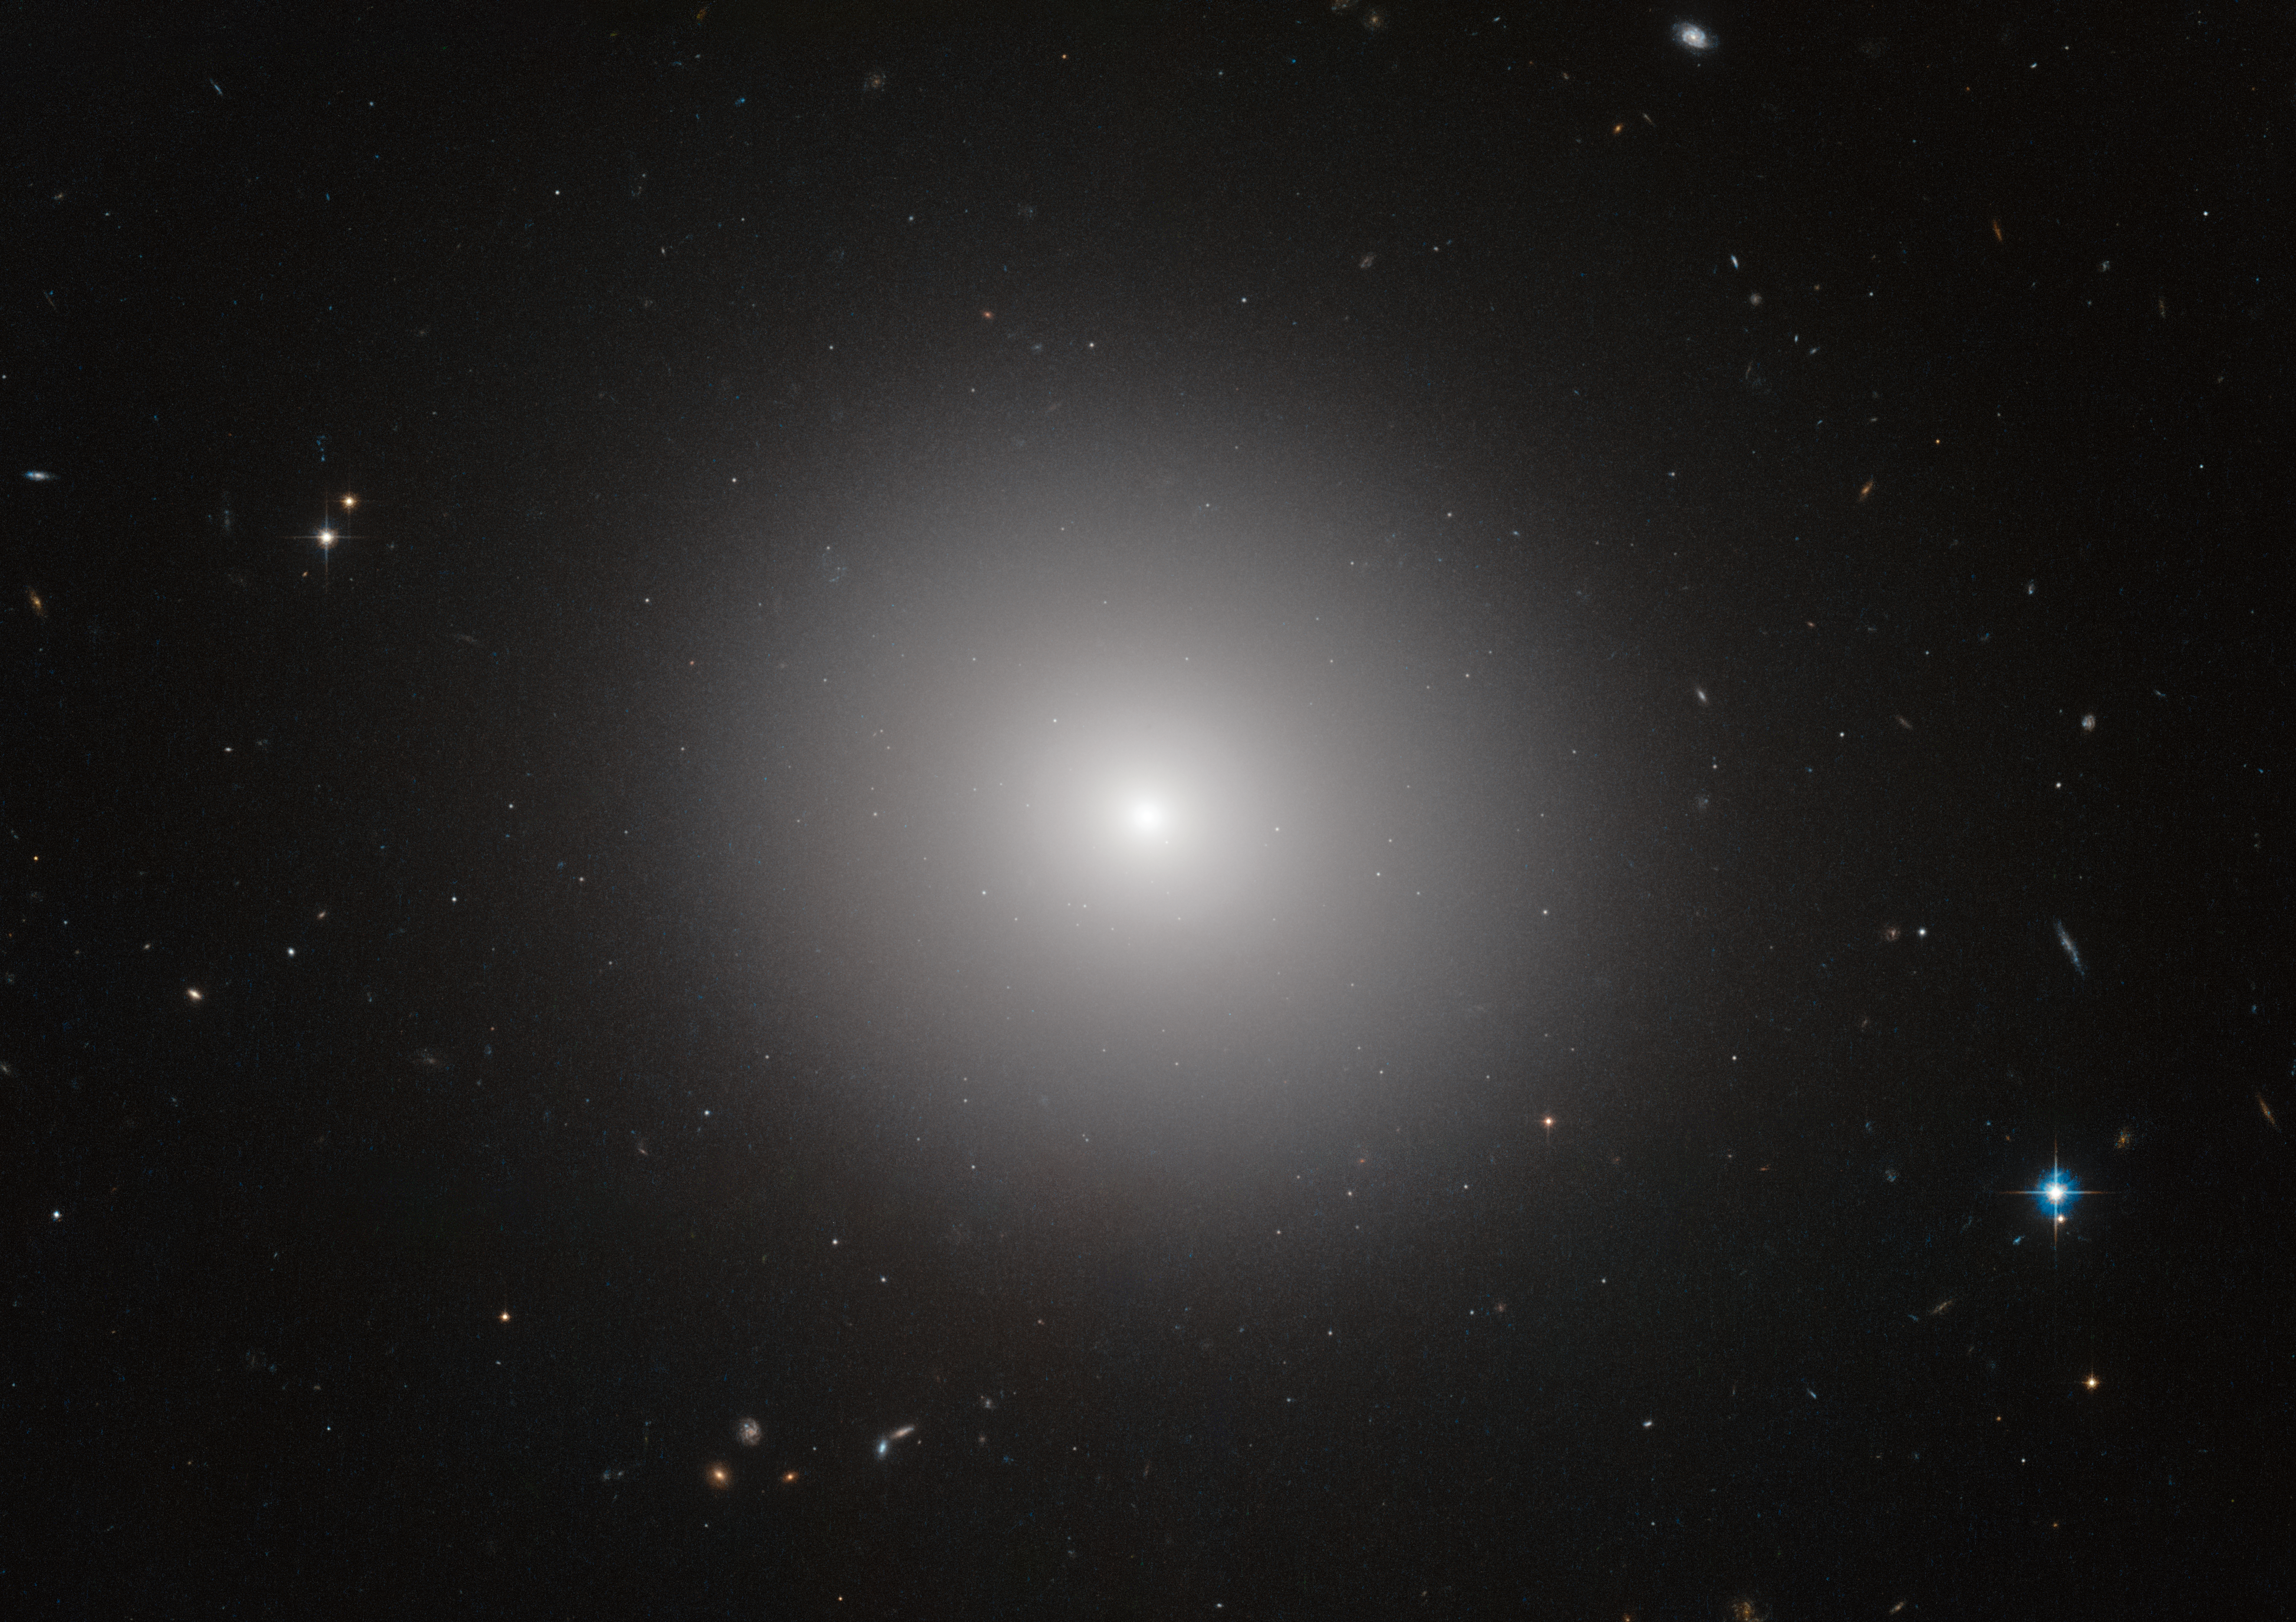

Elliptical galaxy IC 2006

This NASA/ESA Hubble Space Telescope image shows an elliptical galaxy known as IC 2006. Massive elliptical galaxies like these are common in the modern Universe, but how they quenched their once furious rates of star formation is an astrophysical mystery.

Now, the NASA/ESA Hubble Space Telescope and ESO's Very Large Telescope (VLT) have revealed that three billion years after the Big Bang, these types of galaxies still made stars on their outskirts, but no longer in their interiors. The quenching of star formation seems to have started in the cores of the galaxies and then spread to the outer parts.

Credit: ESA/Hubble & NASA
Image acknowledgement: Judy Schmidt and J. Blakeslee (Dominion Astrophysical Observatory). Note that the image is not related to science release content.
Science acknowledgement: M. Carollo (ETH, Switzerland)